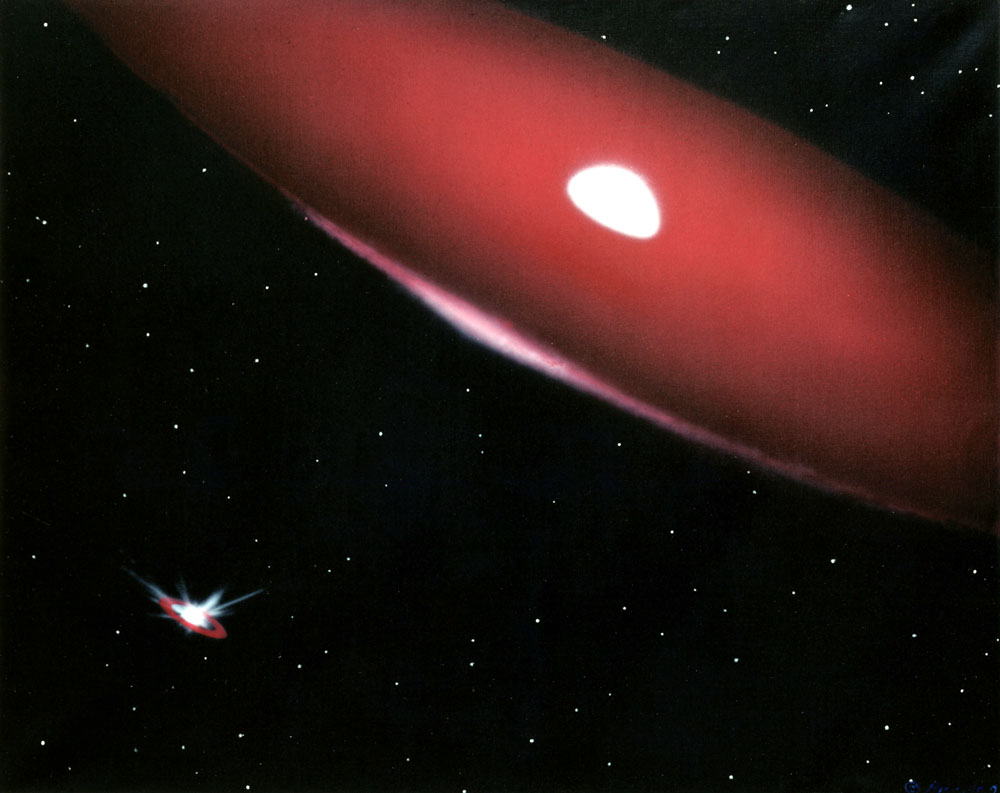

The Phi Persei Duo (artist's impression)

Life near the double-star system of Phi Persei is never dull, as this illustration shows. Taken from the perspective of one of the Hubble Space Telescope observations of Phi Persei, this artist's depiction provides a taste of the double- star system's unstable existence.

Credit: Bill Pounds